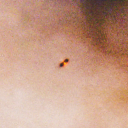

347-1535

One of 42 new proplyds discovered in the Orion Nebula, 347-1535 is one of the dark proplyds that lies relatively far from the nebula’s brightest star, Theta 1 Orionis C.

Credit: NASA/ESA and L. Ricci (ESO)